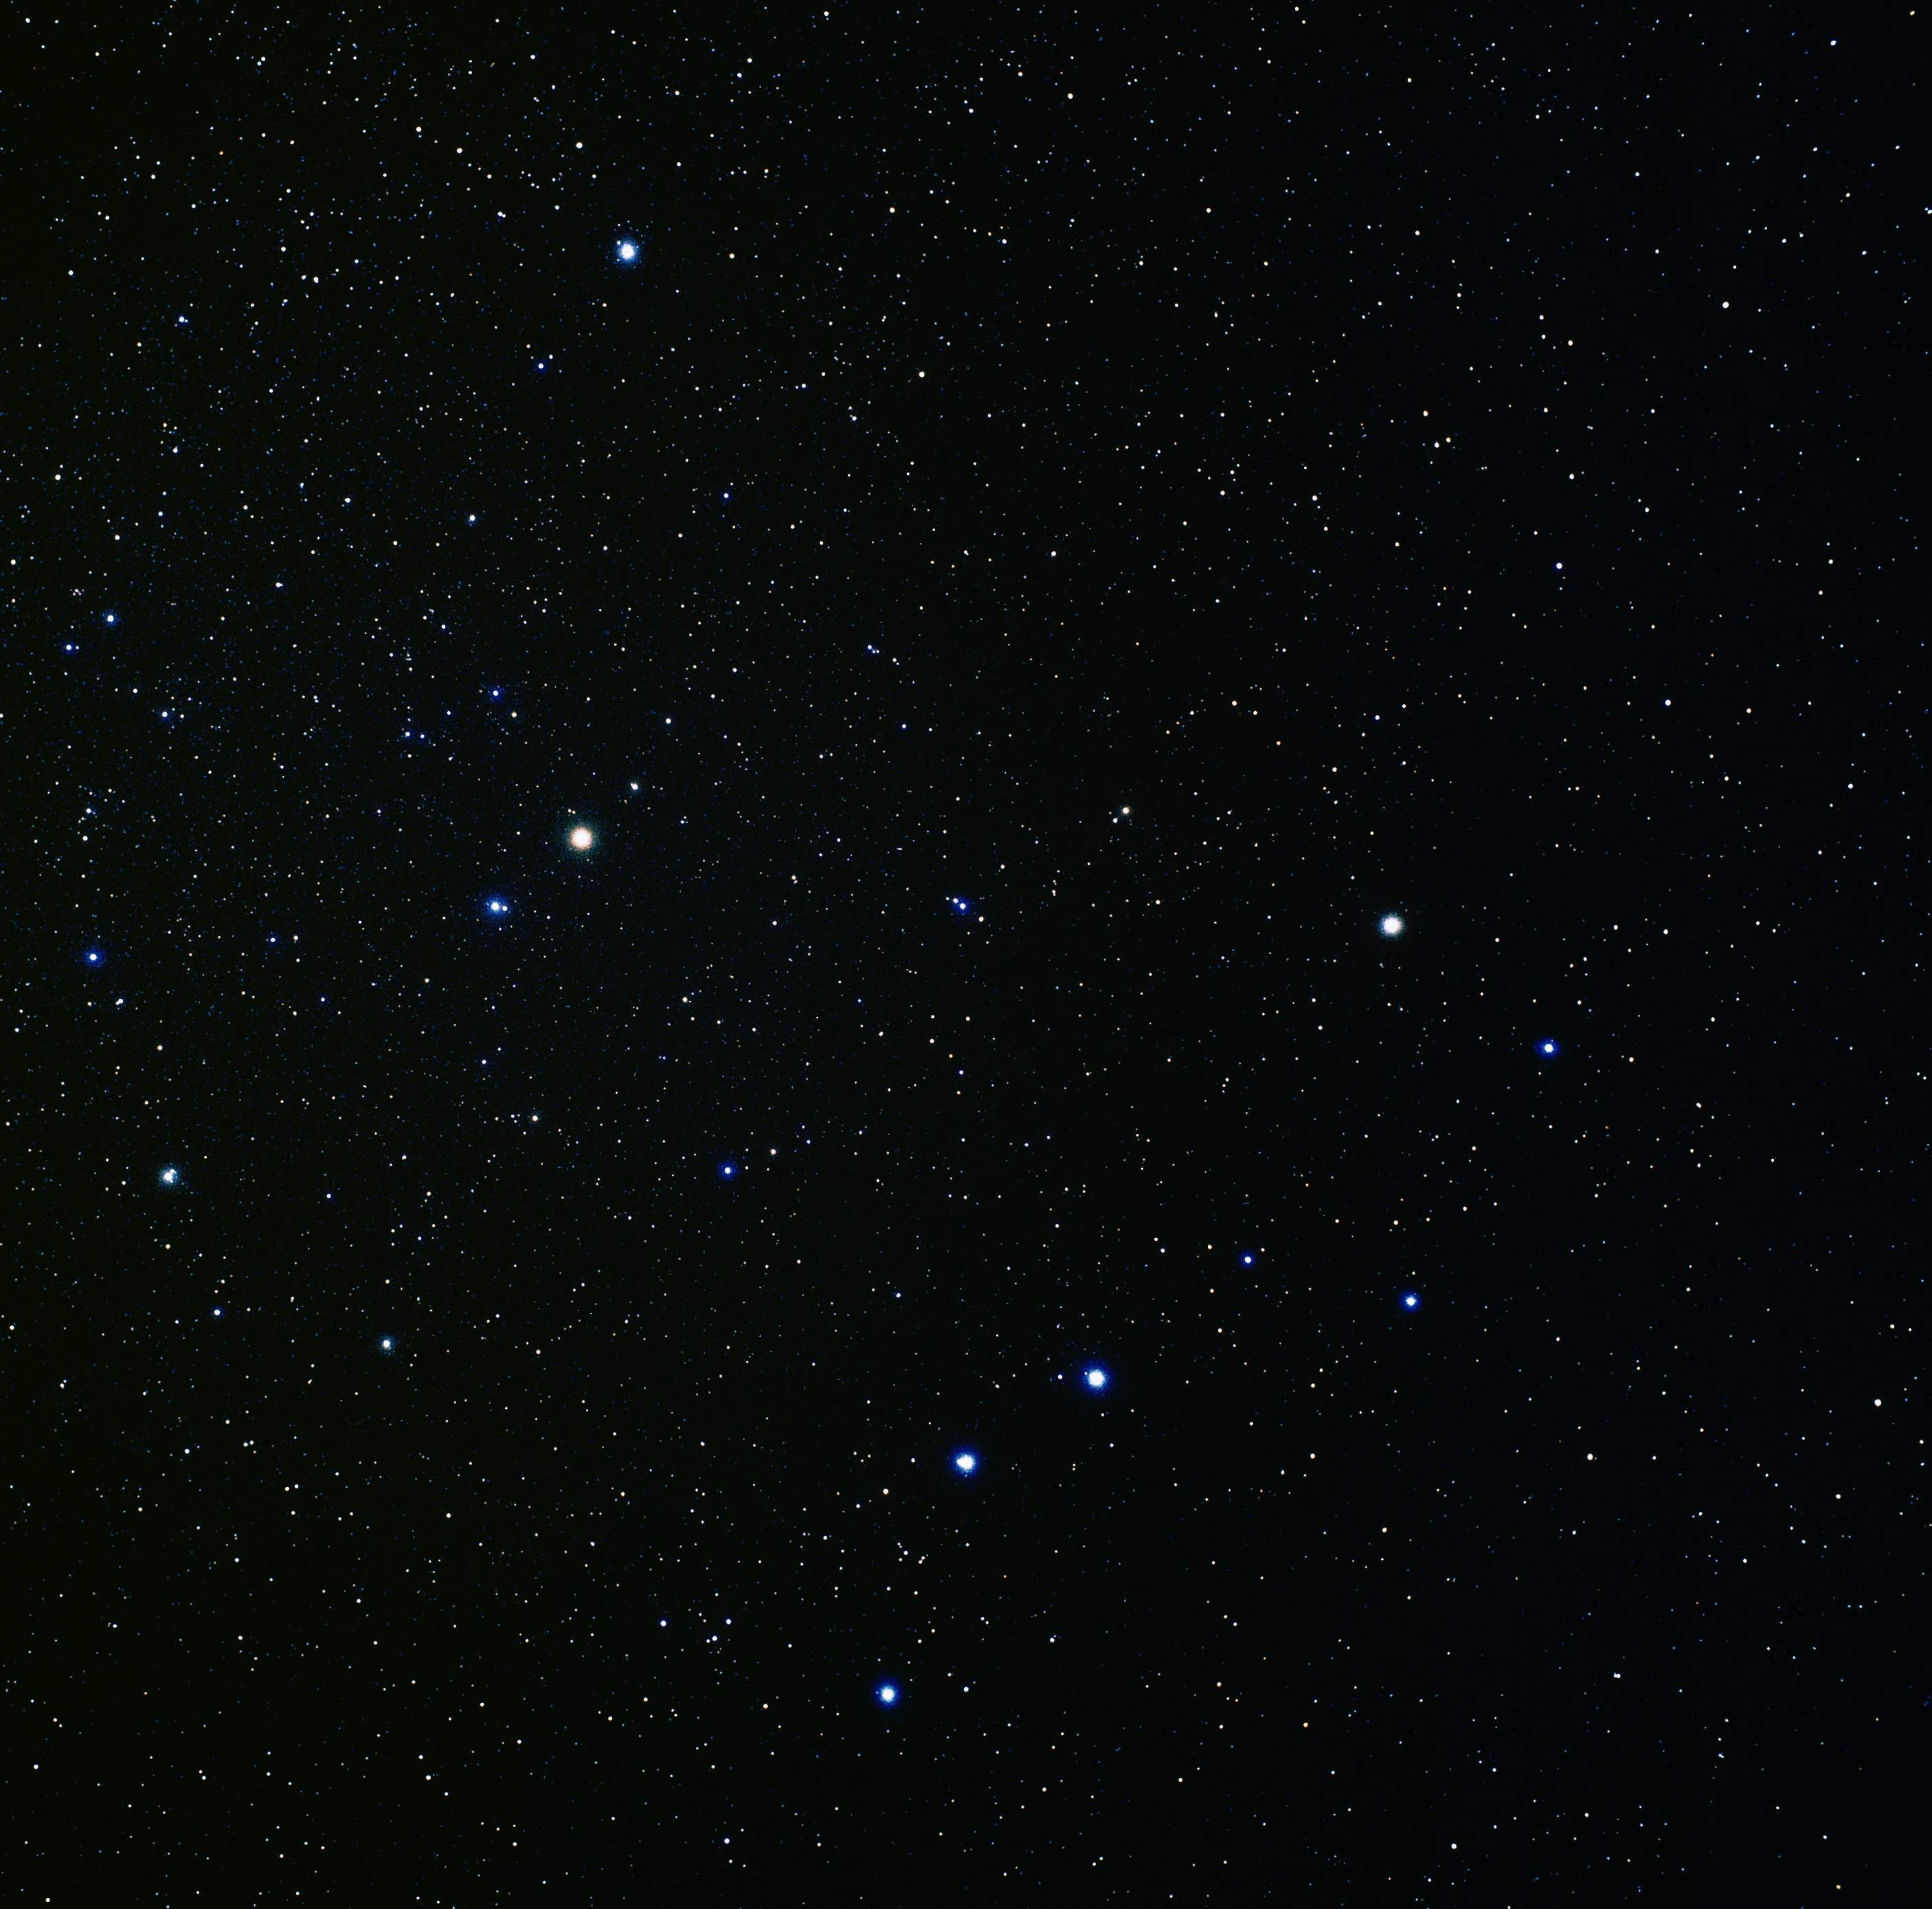

Constellations Ursa Major and Ursa Minor (ground-based image)

This image was taken by astrophotographer Akira Fujii and shows the Plough (Ursa Major) in the lower right, and Ursa Minor to the left of centre.

Credit: Akira Fujii